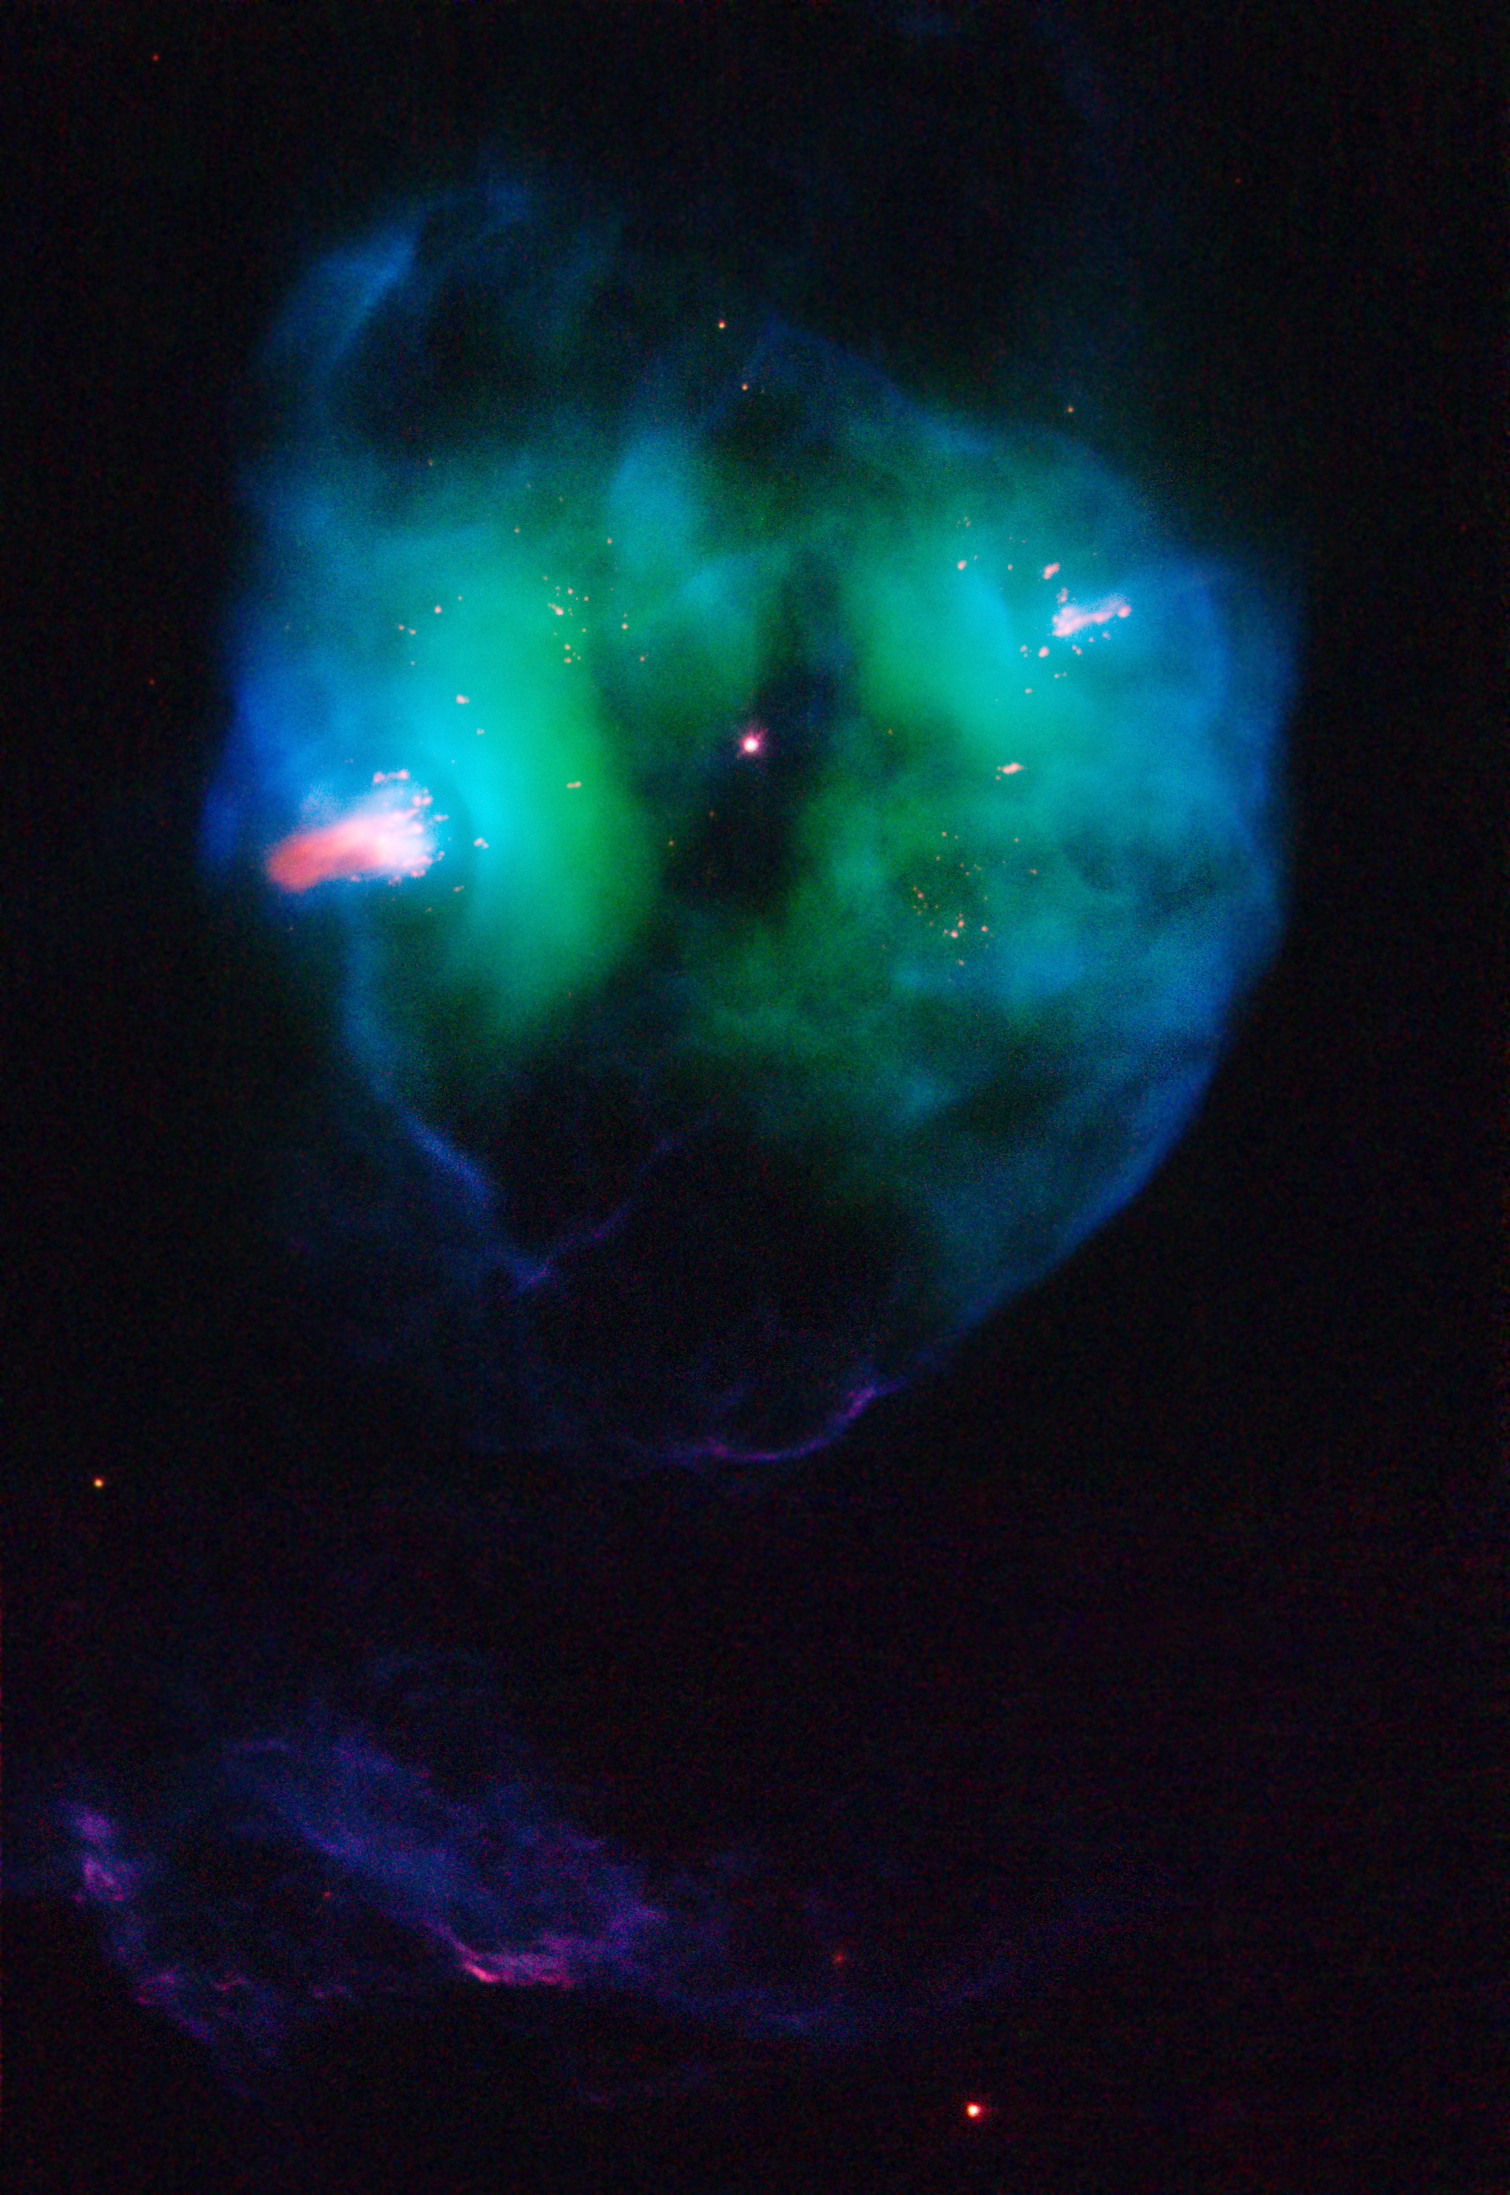

Planetary Nebula NGC 2371

Probing a glowing bubble of gas and dust encircling a dying star, the NASA/ESA Hubble Space Telescope reveals a wealth of previously unseen structures.

The object, called NGC 2371, is a planetary nebula, the glowing remains of a Sun-like star. The remnant star visible at the centre of NGC 2371 is the super-hot core of the former red giant, now stripped of its outer layers. Its surface temperature is a scorching 240,000 degrees Fahrenheit. NGC 2371 lies about 4,300 light-years away in the constellation Gemini.

The Hubble image reveals several remarkable features, most notably the prominent pink clouds lying on opposite sides of the central star. This colour indicates that they are relatively cool and dense, compared to the rest of the gas in the nebula.

Also striking are the numerous, very small pink dots, marking relatively dense and small knots of gas, which also lie on diametrically opposite sides of the star. These features appear to represent the ejection of gas from the star along a specific direction. The jet's direction has changed with time over the past few thousand years. The reason for this behavior is not well understood, but might be related to the possible presence of a second star orbiting the visible central star.

A planetary nebula is an expanding cloud of gas ejected from a star that is nearing the end of its life. The nebula glows because of ultraviolet radiation from the hot remnant star at its centre. In only a few thousand years the nebula will dissipate into space. The central star will then gradually cool down, eventually becoming a white dwarf, the final stage of evolution for nearly all stars.

The Hubble picture of NGC 2371 is a false-color image, prepared from exposures taken through filters that detect light from sulfur and nitrogen (red), hydrogen (green), and oxygen (blue). These images were taken with Hubble's Wide Field Planetary Camera 2 in November 2007, as part of the Hubble Heritage program.

Credit: NASA, ESA, and the Hubble Heritage Team (STScI/AURA)